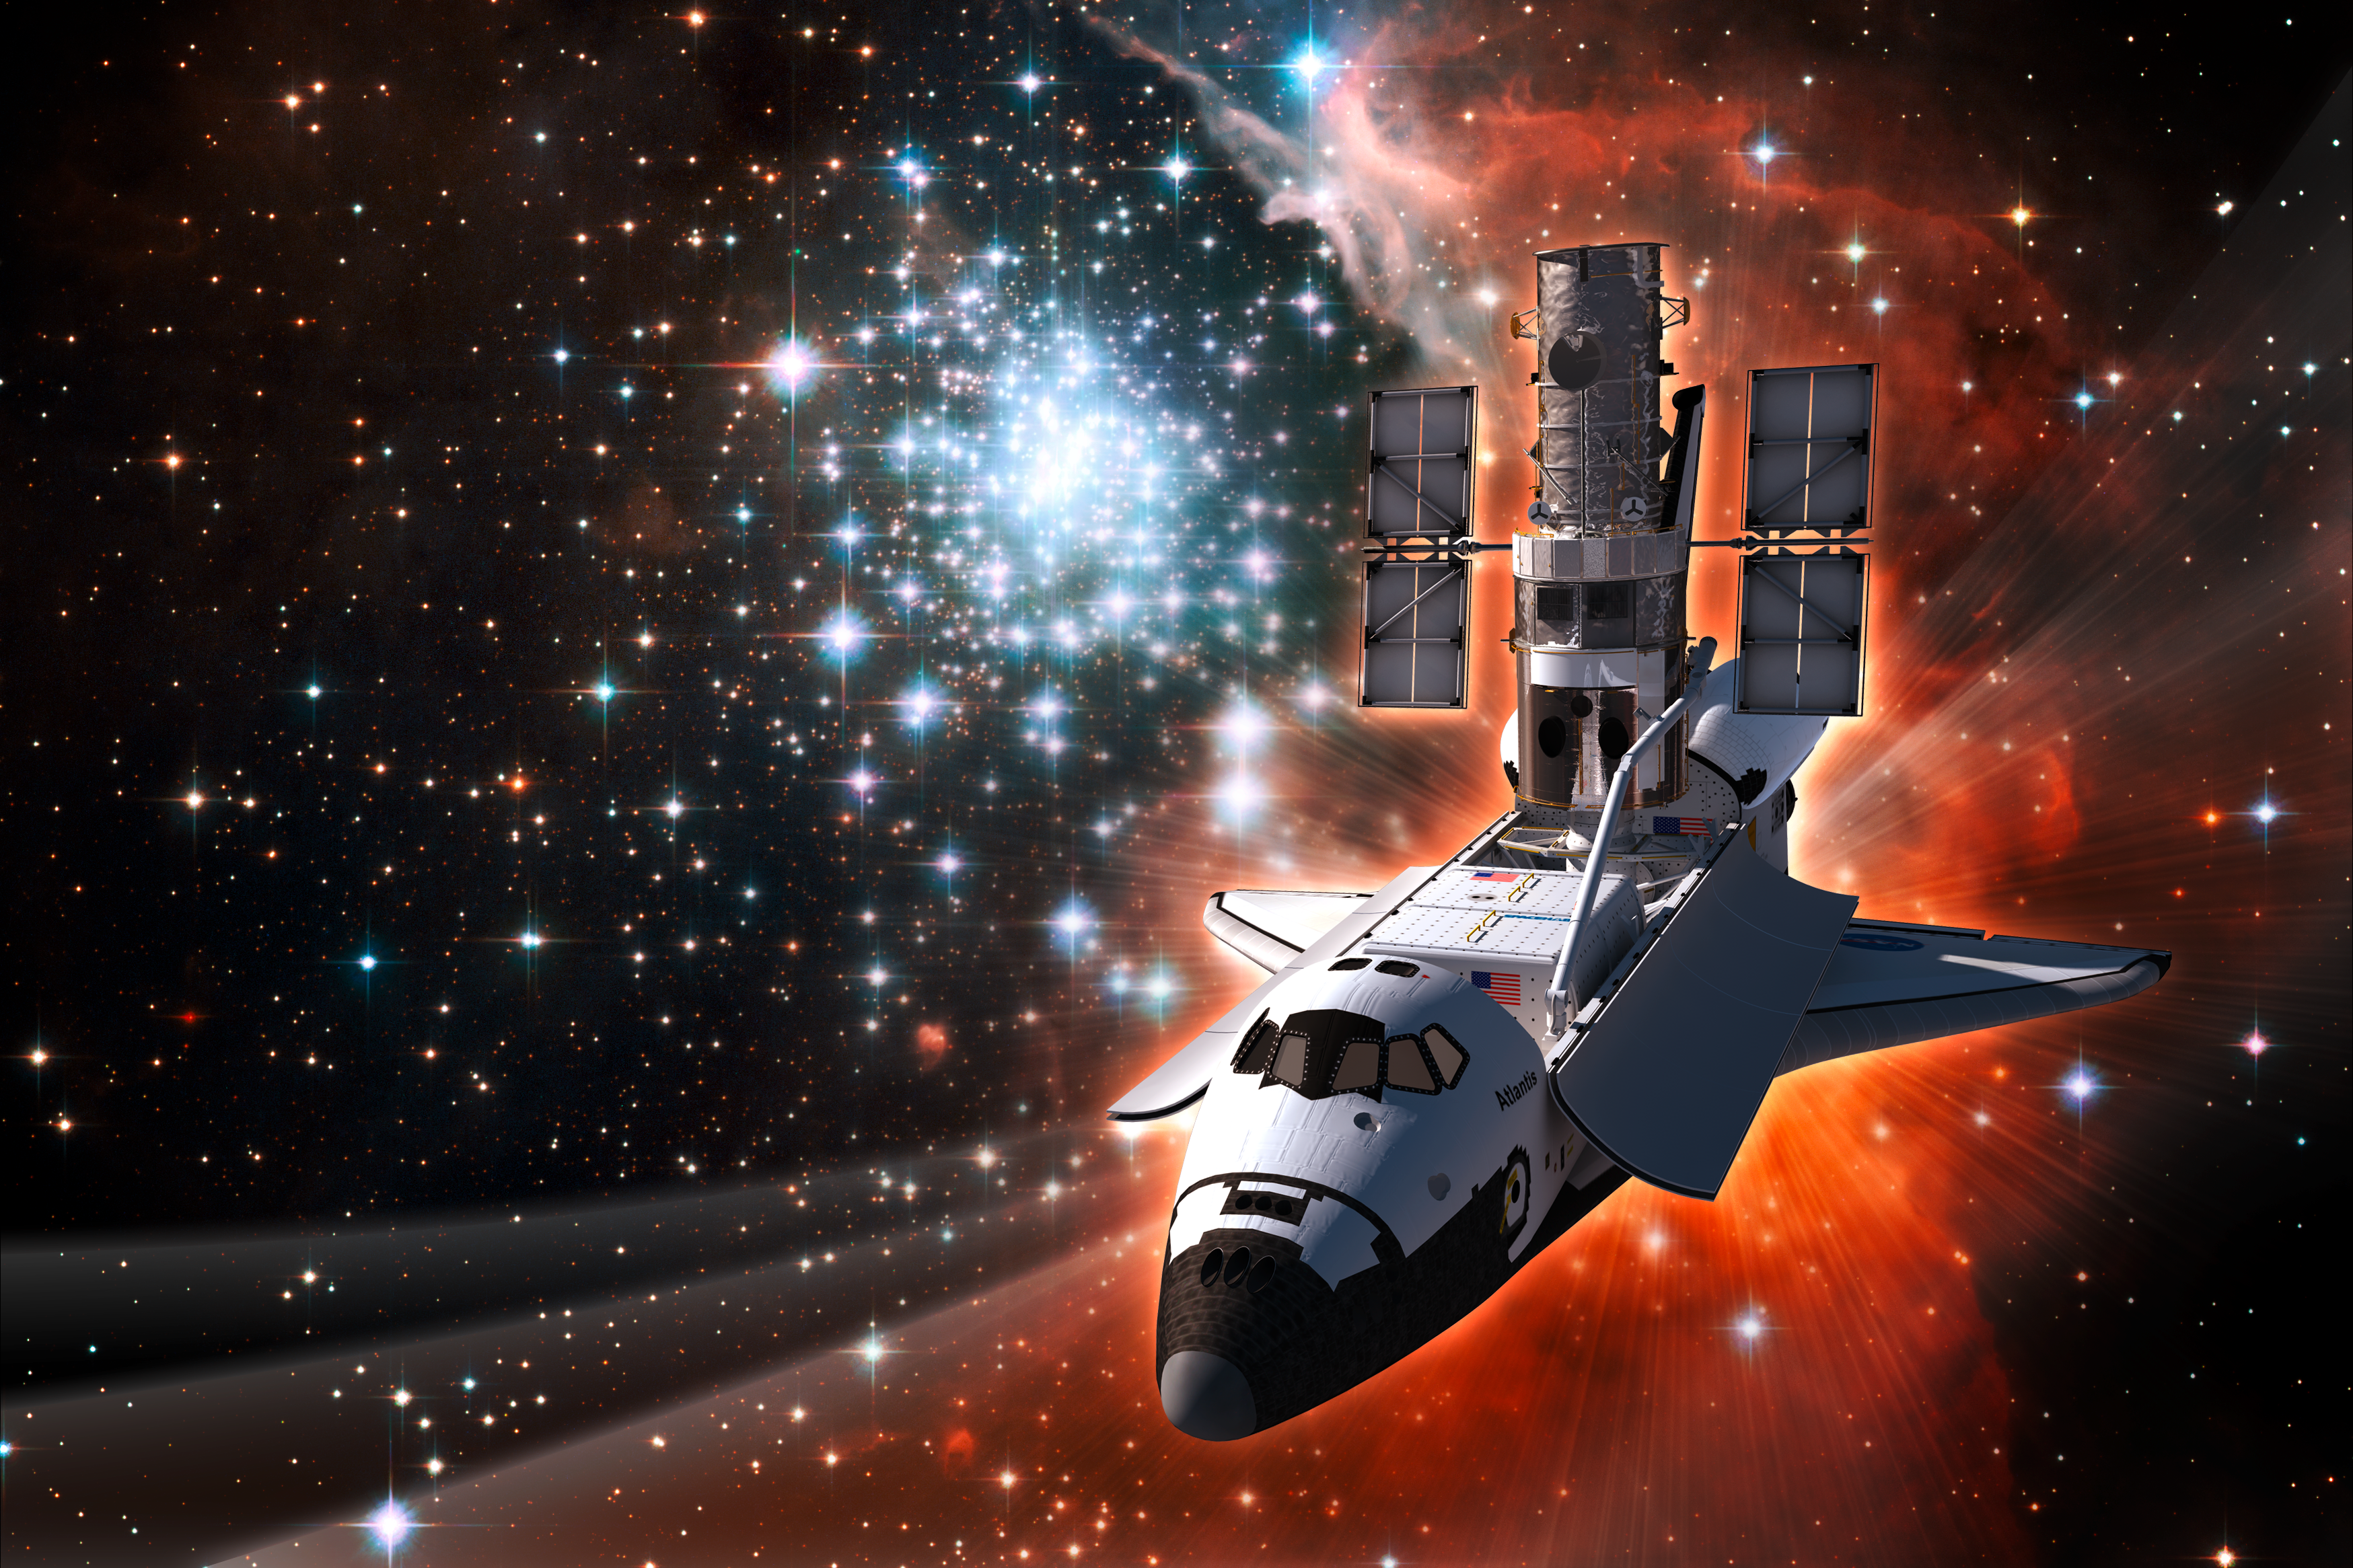

Space Shuttle Atlantis with Hubble

This artist's concept shows the NASA/ESA Hubble Space Telescope aboard the space shuttle Atlantis. In the background is one of the most impressive massive young star clusters in the Milky Way - the spectacular star-forming region NGC 3603 - as imaged by Hubble. This image was produced in anticipation of the launch of STS-125, the fifth and final servicing mission to Hubble.

Credit: ESA/Hubble (Luis Calçada) & NASA